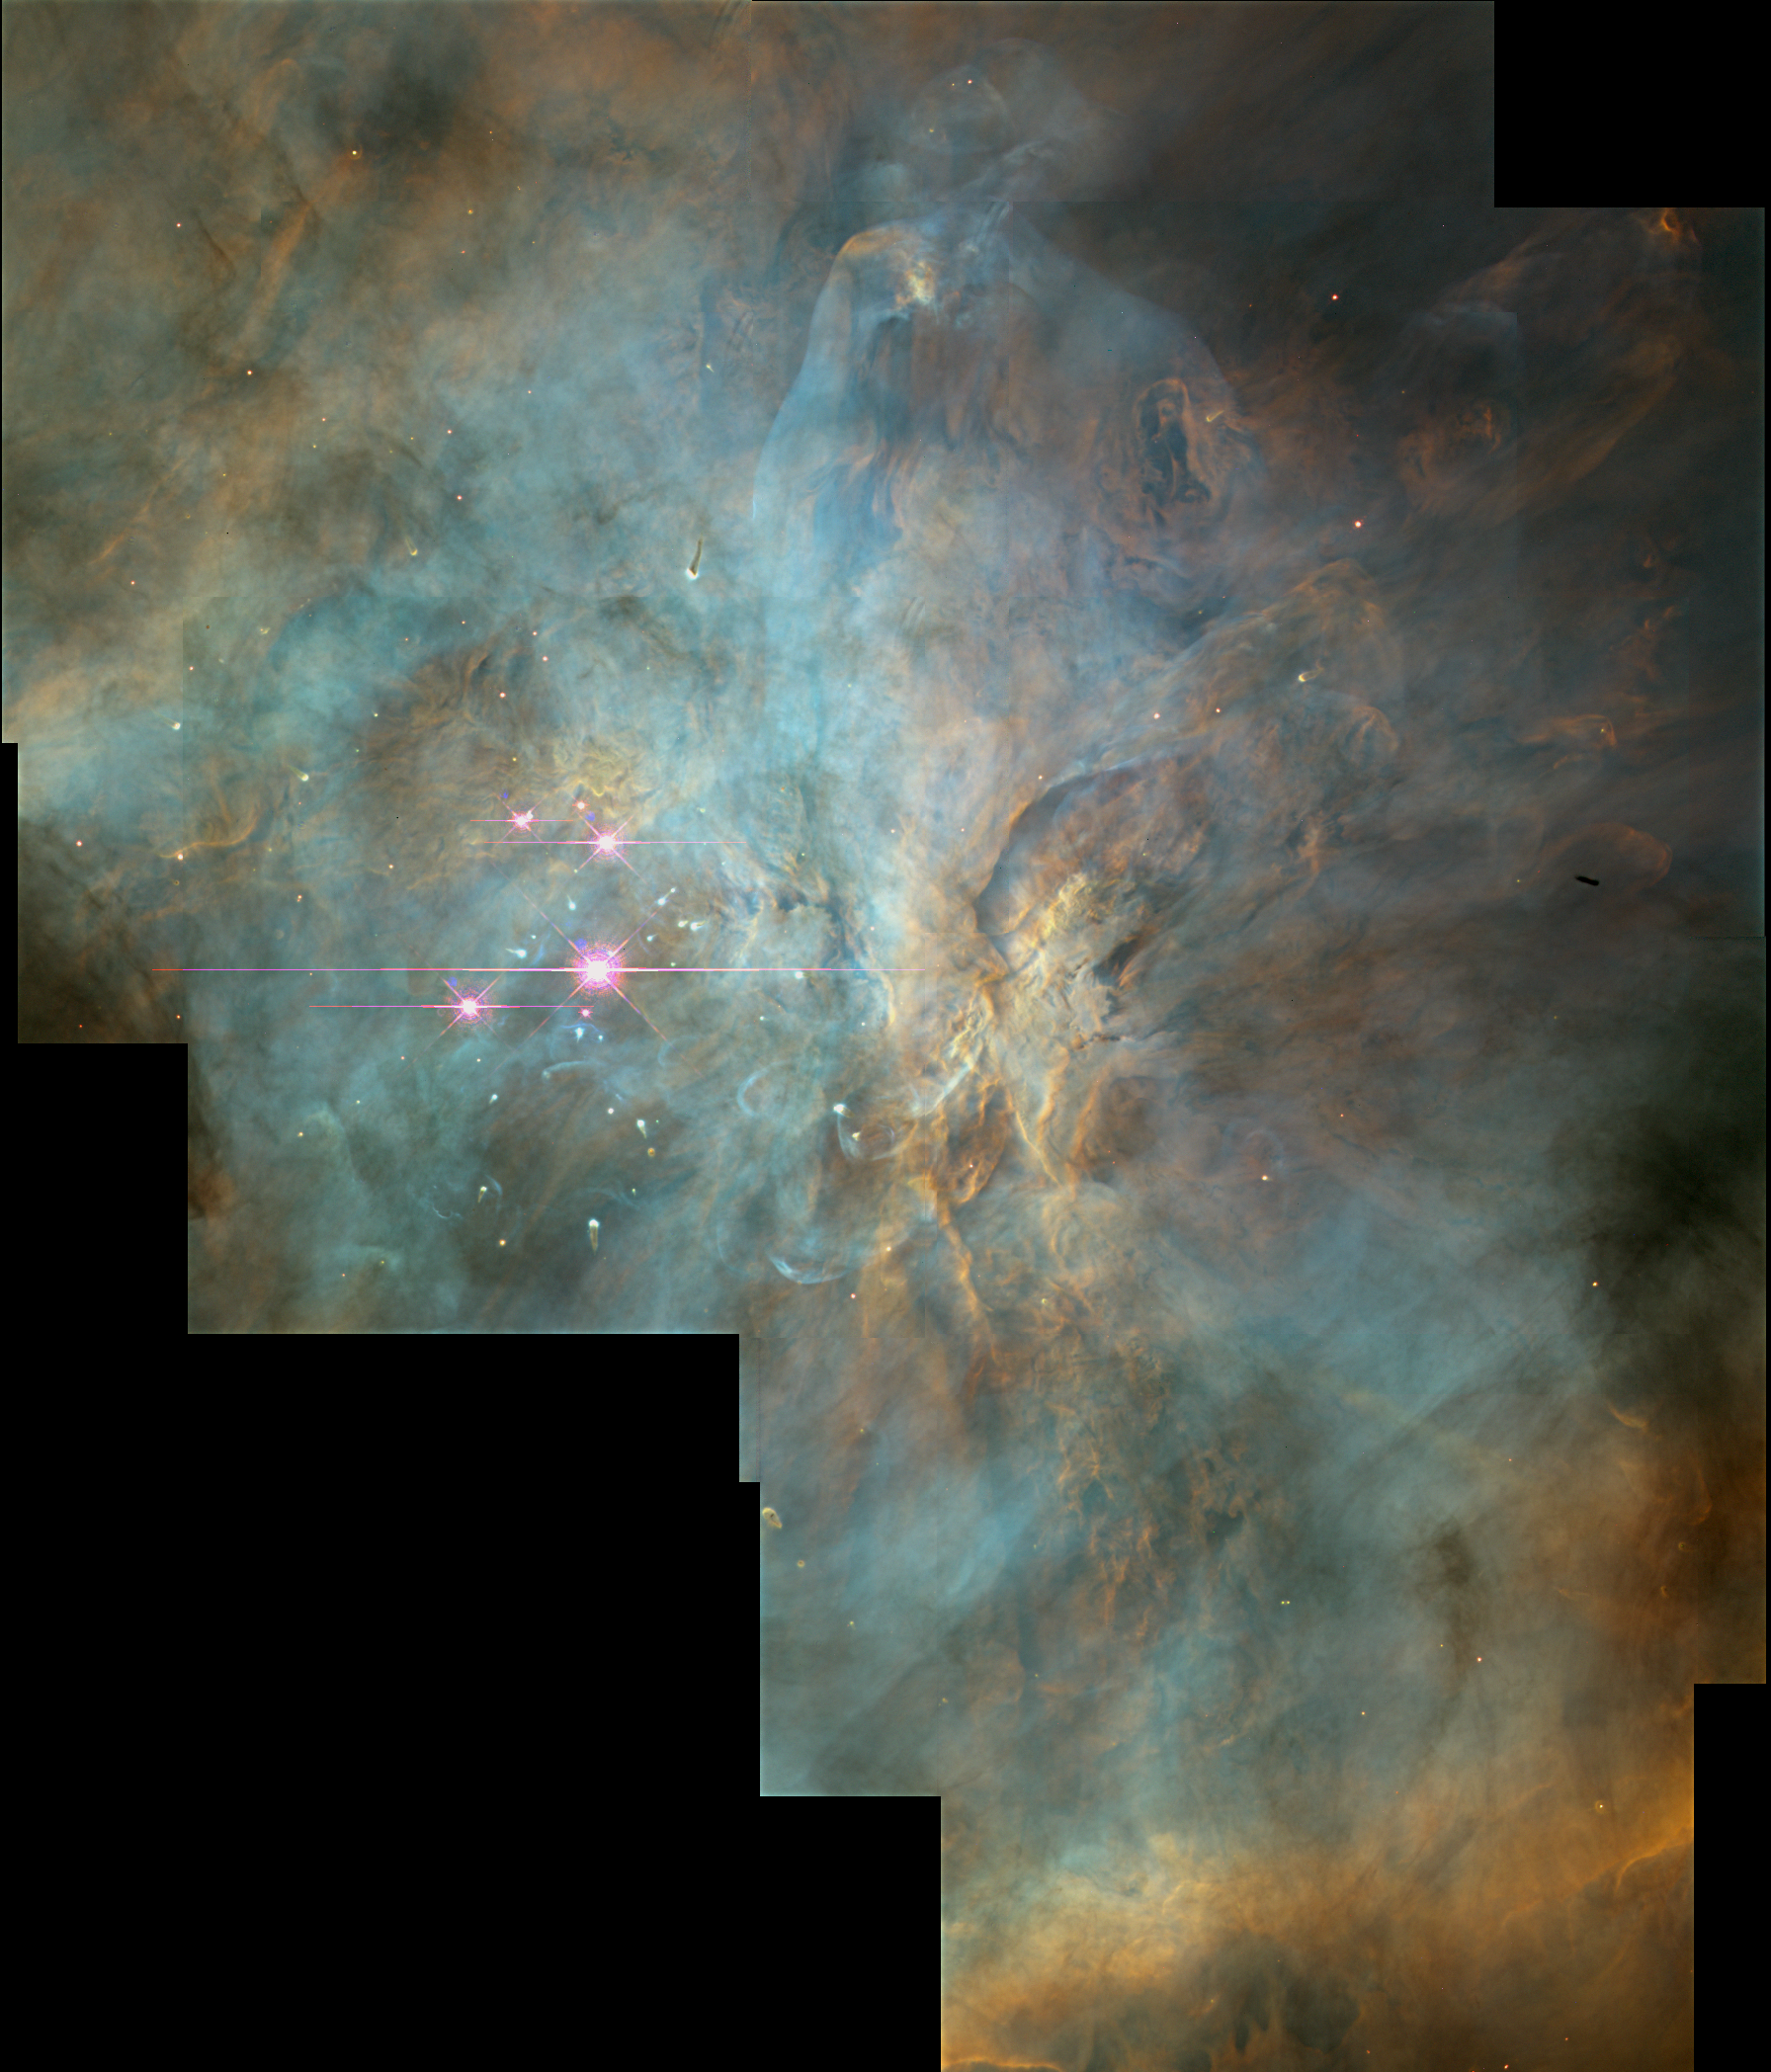

Starbirth

This mosaic shows the center of the Orion Nebula. Many of the nebula's details can't be captured in a single picture - any more than one snapshot of the Grand Canyon yields clues to its formation and history. Like the Grand Canyon, the Orion nebula has a dramatic surface topography — of glowing gasses instead of rock — with peaks, valleys and walls. They are illuminated and heated by a torrent of energetic ultraviolet light from its four hottest and most massive stars, called the Trapezium, which lie near the center of the image.

Credit: NASA, C.R. O'Dell and S.K. Wong (Rice University)